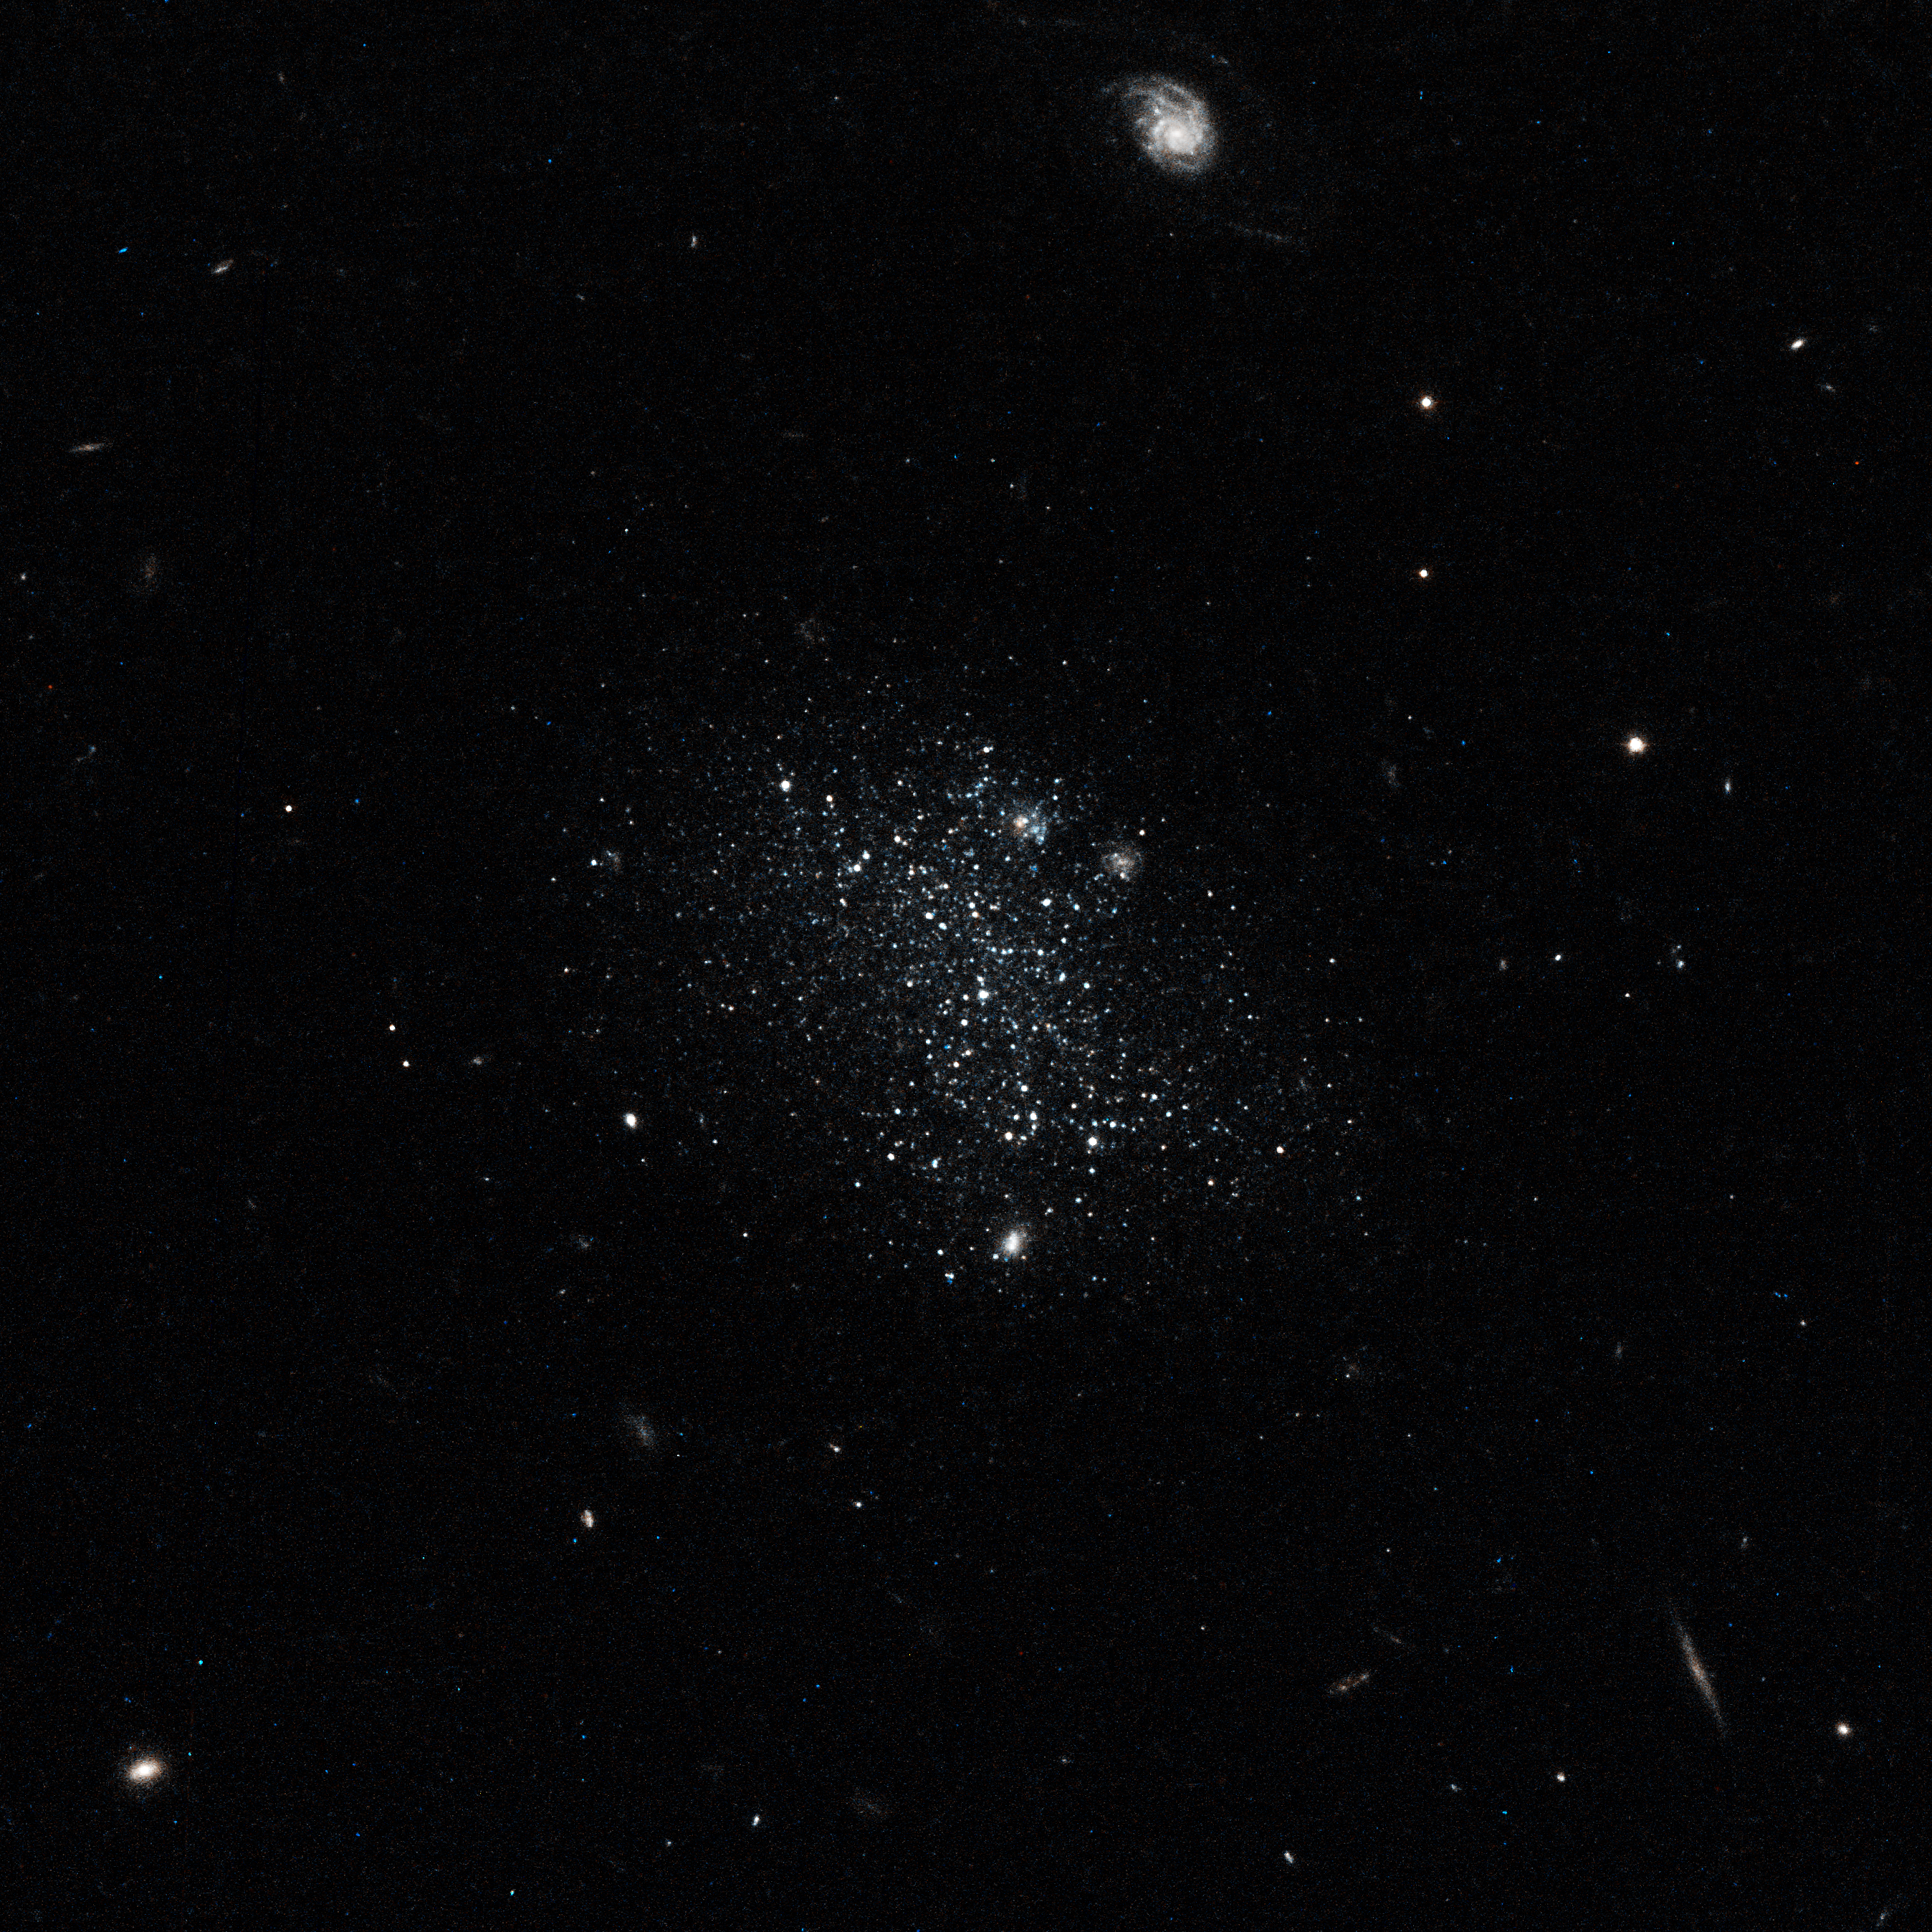

Dwarf galaxy Pisces A

This image shows the galaxy Pisces A. The bright object at the top of the image is a distant background galaxy. Other distant background galaxies are visible as bright dots. Pisces A is roughly 19 million light-years away.

Credit: NASA, ESA, and E. Tollerud (STScI)